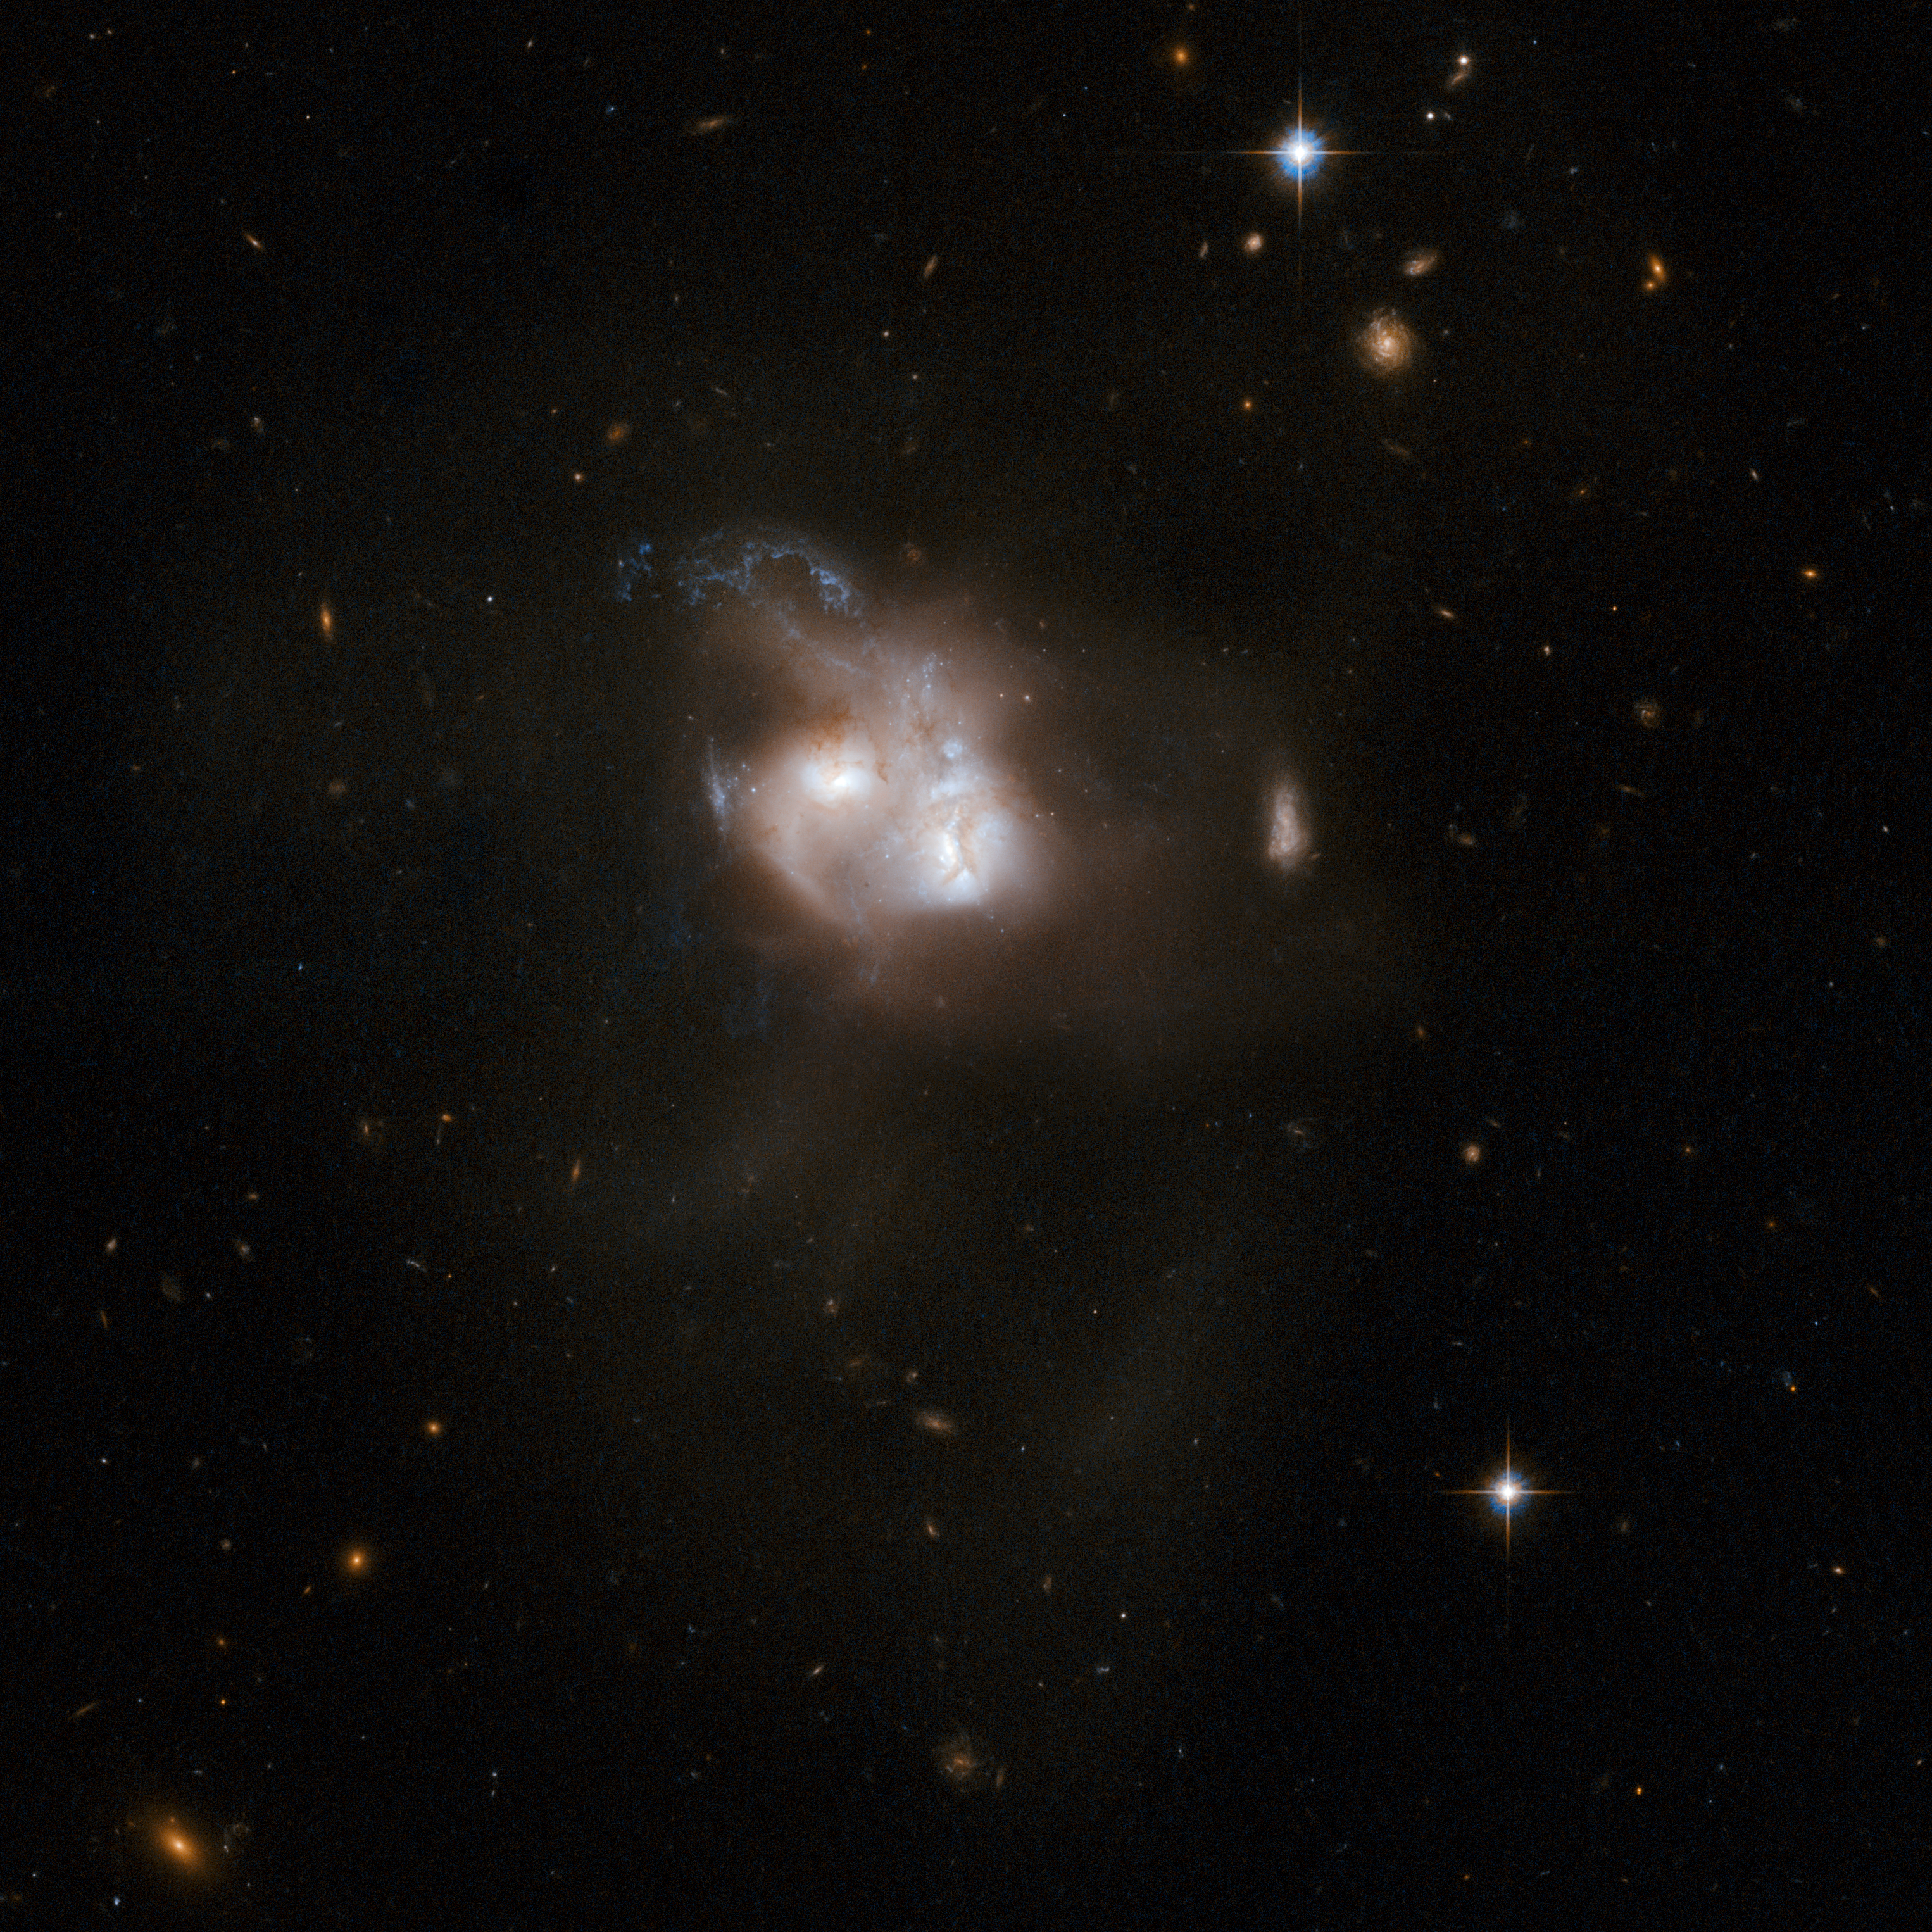

NGC 5256

NGC 5256, also known as Markarian 266, is a striking example of two disc galaxies that are about to merge. Spectacular streamers of gas surround the two nuclei and eye-catching blue spiral trails indicate recent star formation. The shape of the object is highly disturbed and observations in various wavelength regimes - infrared, millimetre-wave and radio - provide additional evidence for a starburst in this system. NGC 5256 is located in the constellation of Ursa Major, the Great Bear, some 350 million light-years from Earth. Each galaxy also contains an active galactic nucleus, evidence that the chaos is allowing gas to fall into the regions around central black holes as well as feeding starbursts. Recent observations from the Chandra X-ray Observatory show that both nuclei, as well as a region of hot gas in between them, have been heated by the shock waves driven as gas clouds at high velocities collide.

This image is part of a large collection of 59 images of merging galaxies taken by the Hubble Space Telescope and released on the occasion of its 18th anniversary on 24th April 2008.

Credit: NASA, ESA, the Hubble Heritage Team (STScI/AURA)-ESA/Hubble Collaboration and A. Evans (University of Virginia, Charlottesville/NRAO/Stony Brook University)